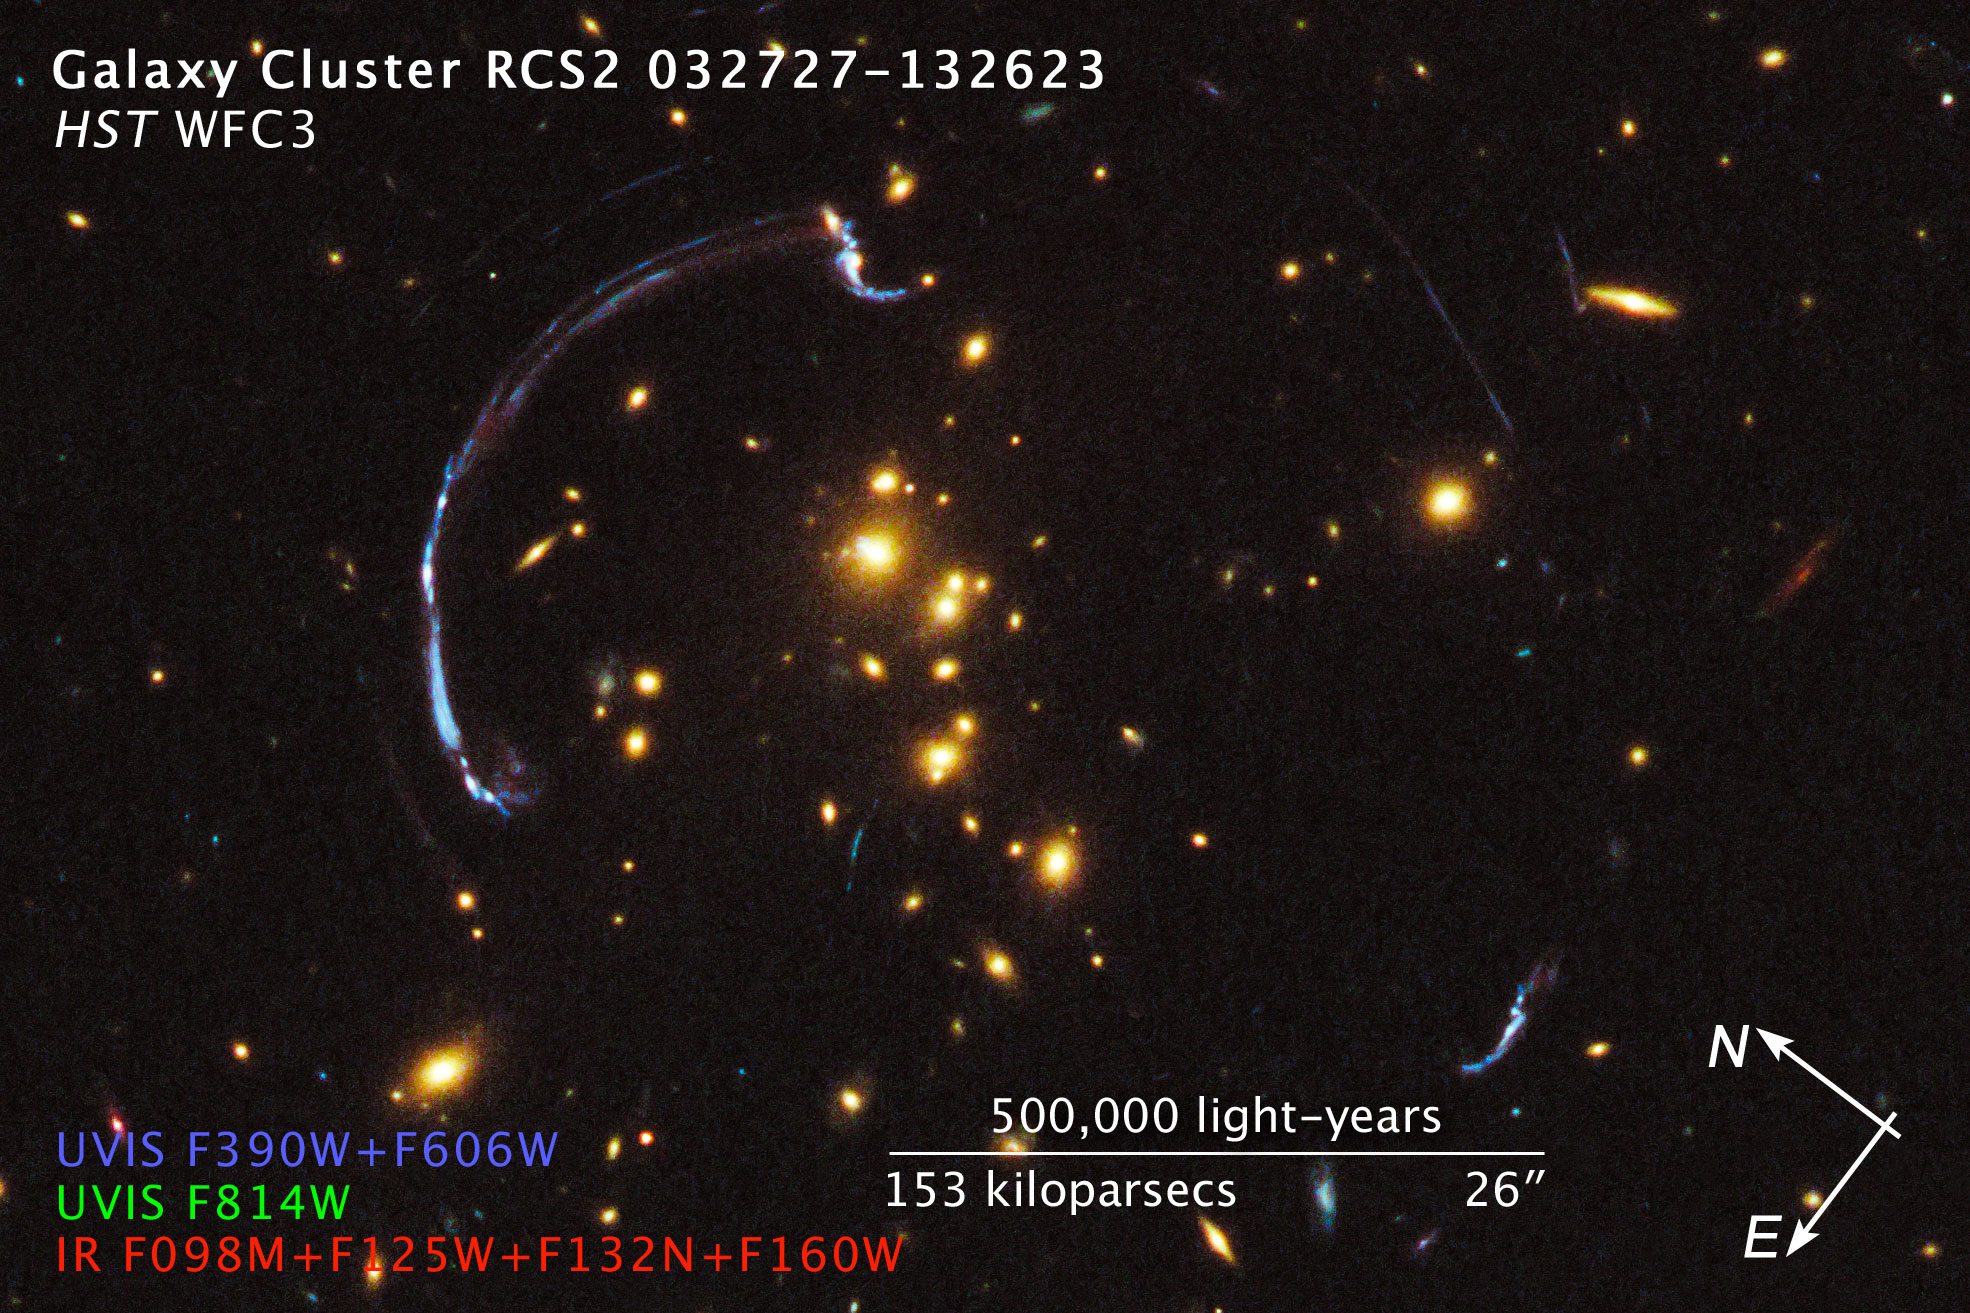

Compass and scale image of galaxy cluster RCS2 032727-132623

Compass and scale image of galaxy cluster RCS2 032727-132623.

Credit: NASA, ESA, and Z. Levay (STScI). Image Credit: NASA, ESA, J. Rigby (NASA Goddard Space Flight Center), and K. Sharon (Kavli Institute for Cosmological Physics, University of Chicago), and M. Gladders and E. Wuyts (University of Chicago)